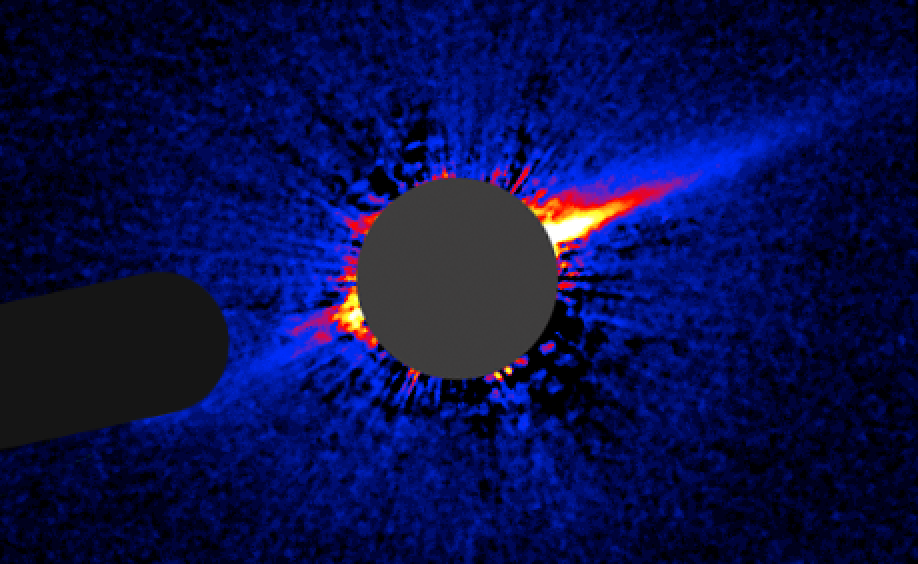

HD 15115, July 17, 2006: Unannotated

This image taken by NASA/ESA Hubble Space Telescope shows a lopsided debris disk around the young star HD 15115.

Credit: NASA, ESA, and P. Kalas (University of California, Berkeley)